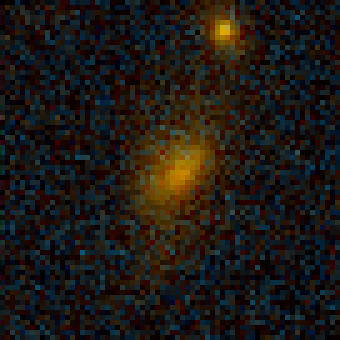

Galaxy Cluster MS 1054-03

Exciting Hubble Space Telescope images of more than a dozen very distant colliding galaxies indicate that, at least in some cases, big massive galaxies form through collisions between smaller ones, in a 'generation after generation' never-ending story.

Credit: Pieter van Dokkum, Marijn Franx (University of Groningen/Leiden), ESA and NASA